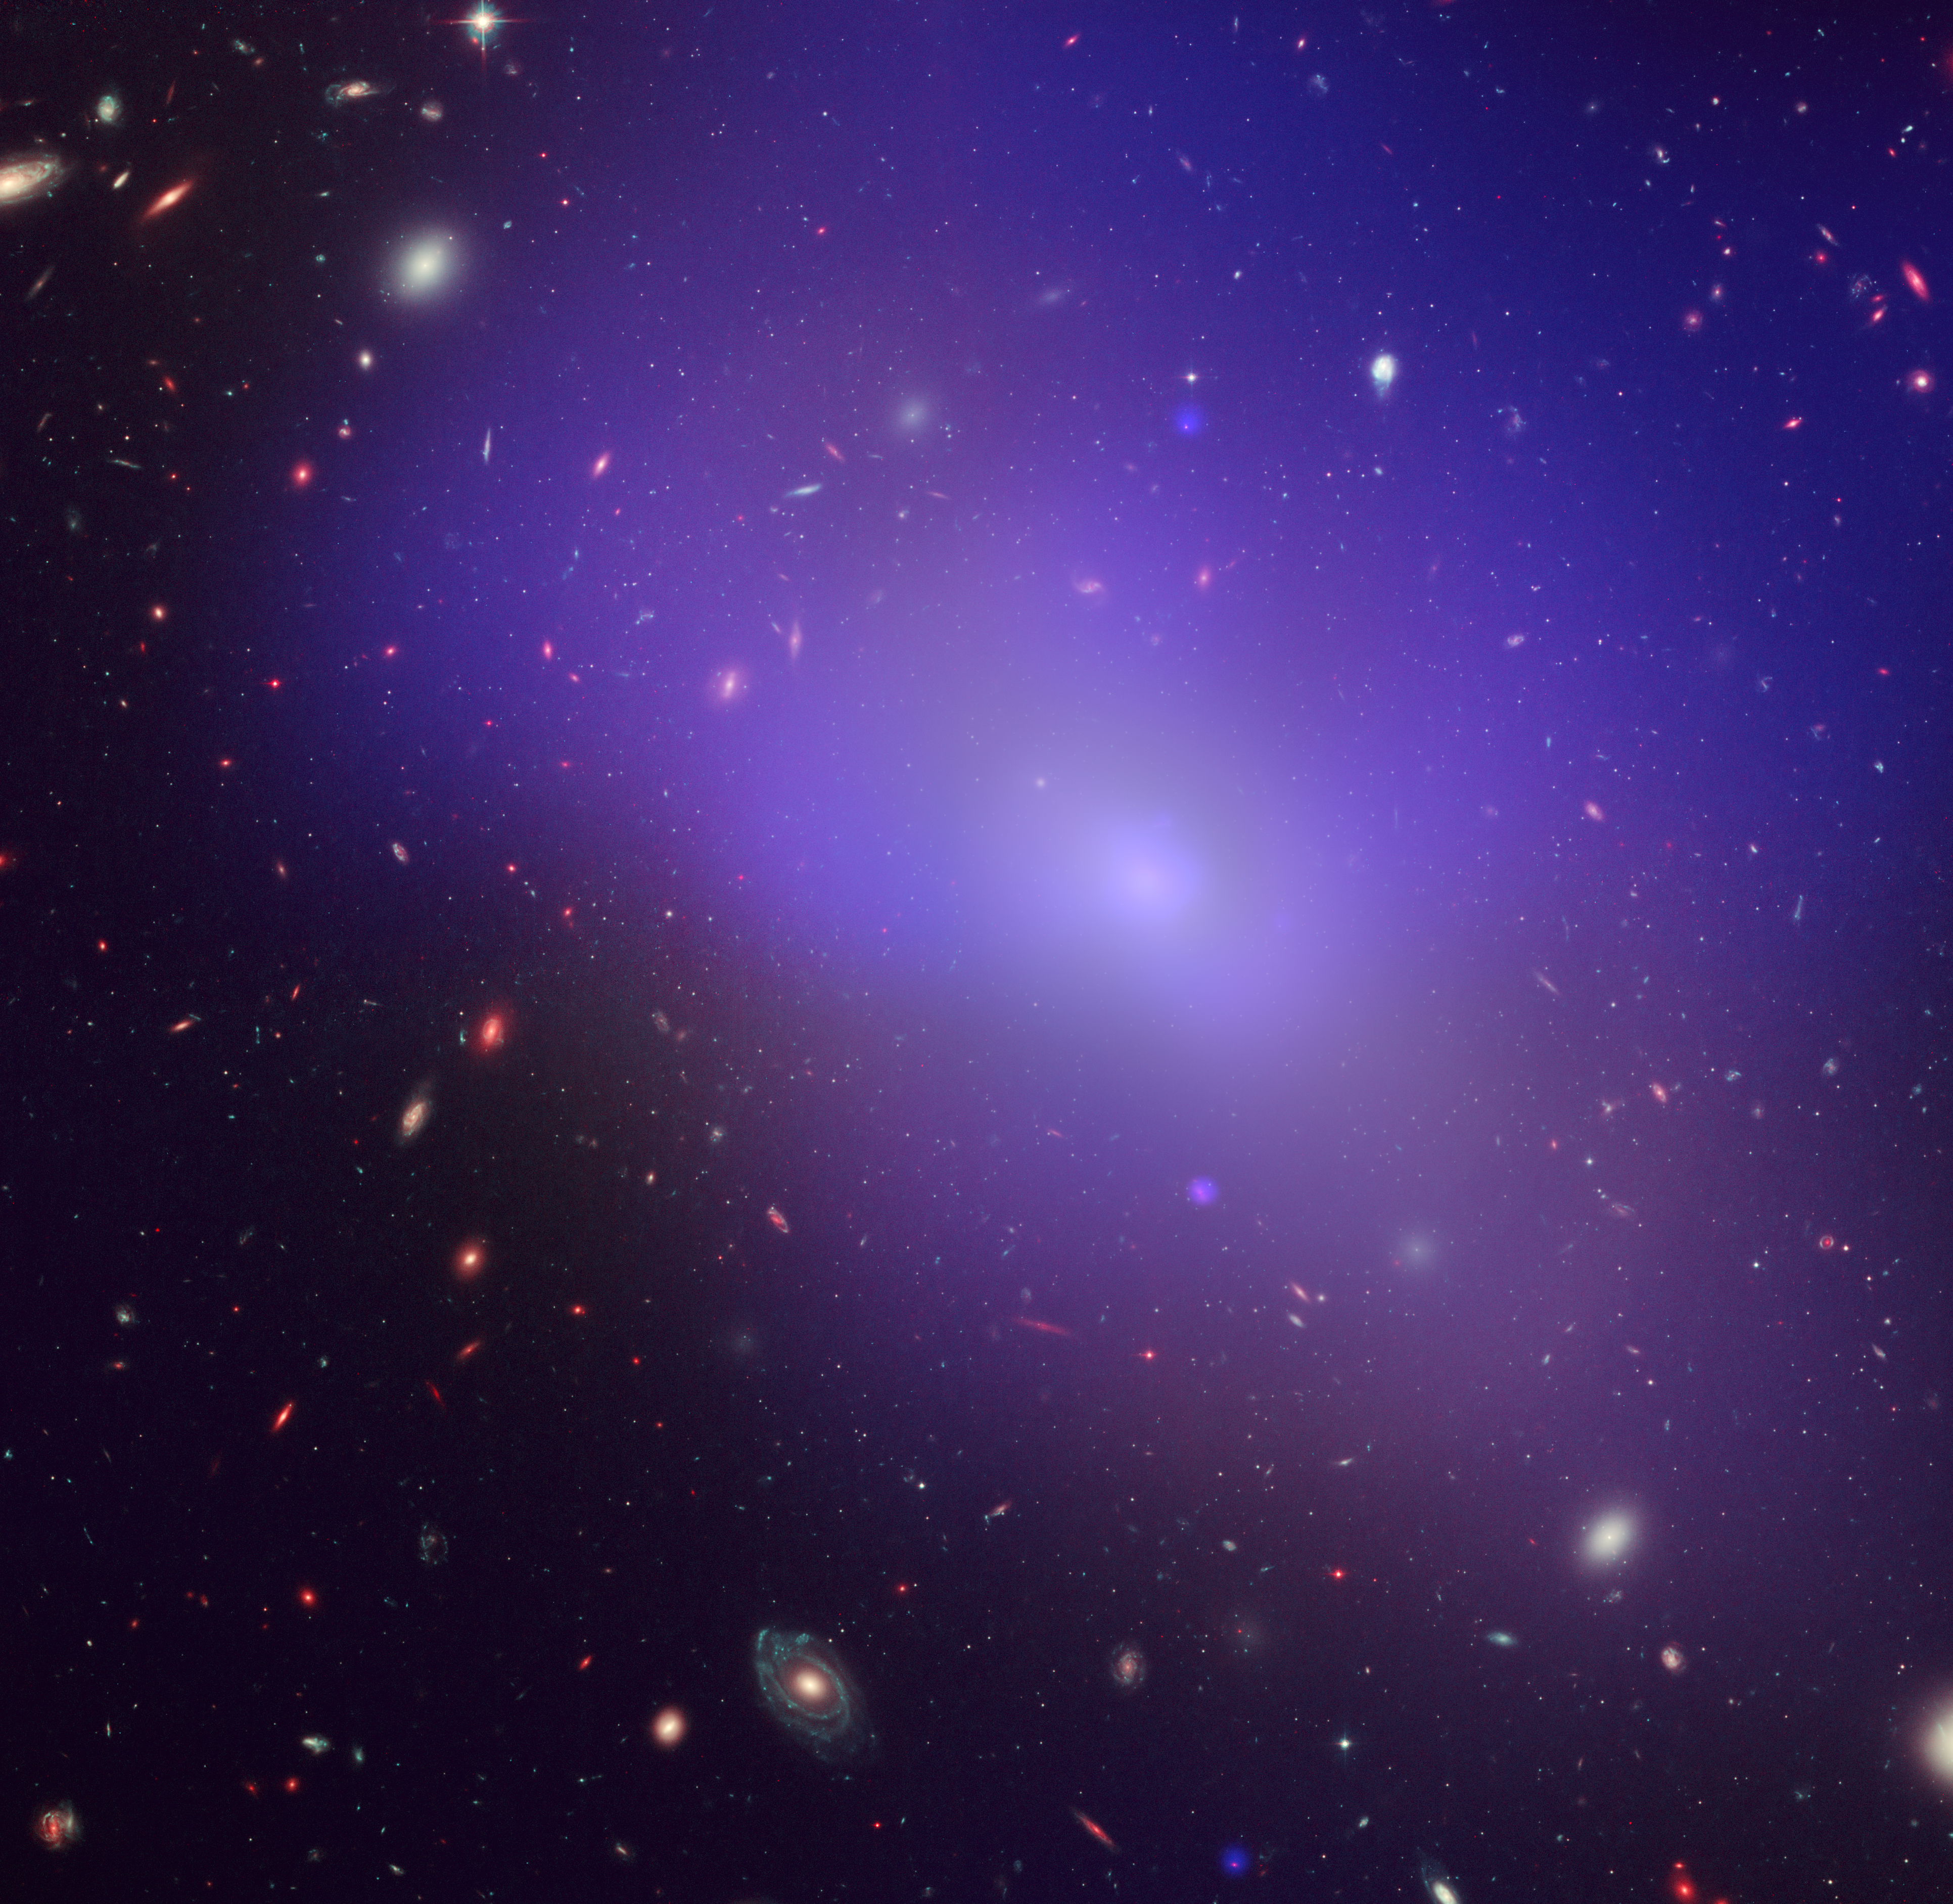

NGC 1132 in visible and X-Ray

This image of the elliptical galaxy NGC 1132 combines an image from NASA's Chandra X-Ray Observatory obtained in 2004 with images from the NASA/ESA Hubble Space Telescope made in 2005 and 2006 in green and near-infrared light. The blue/purple in the image is the X-ray glow from hot, diffuse gas. The giant foreground galaxy, numerous dwarf galaxies in its neighbourhood, and many much more distant galaxies in the background are seen in visible light.

Credit: NASA, ESA, M. West (ESO, Chile), and CXC/Penn State University/G. Garmire, et al.